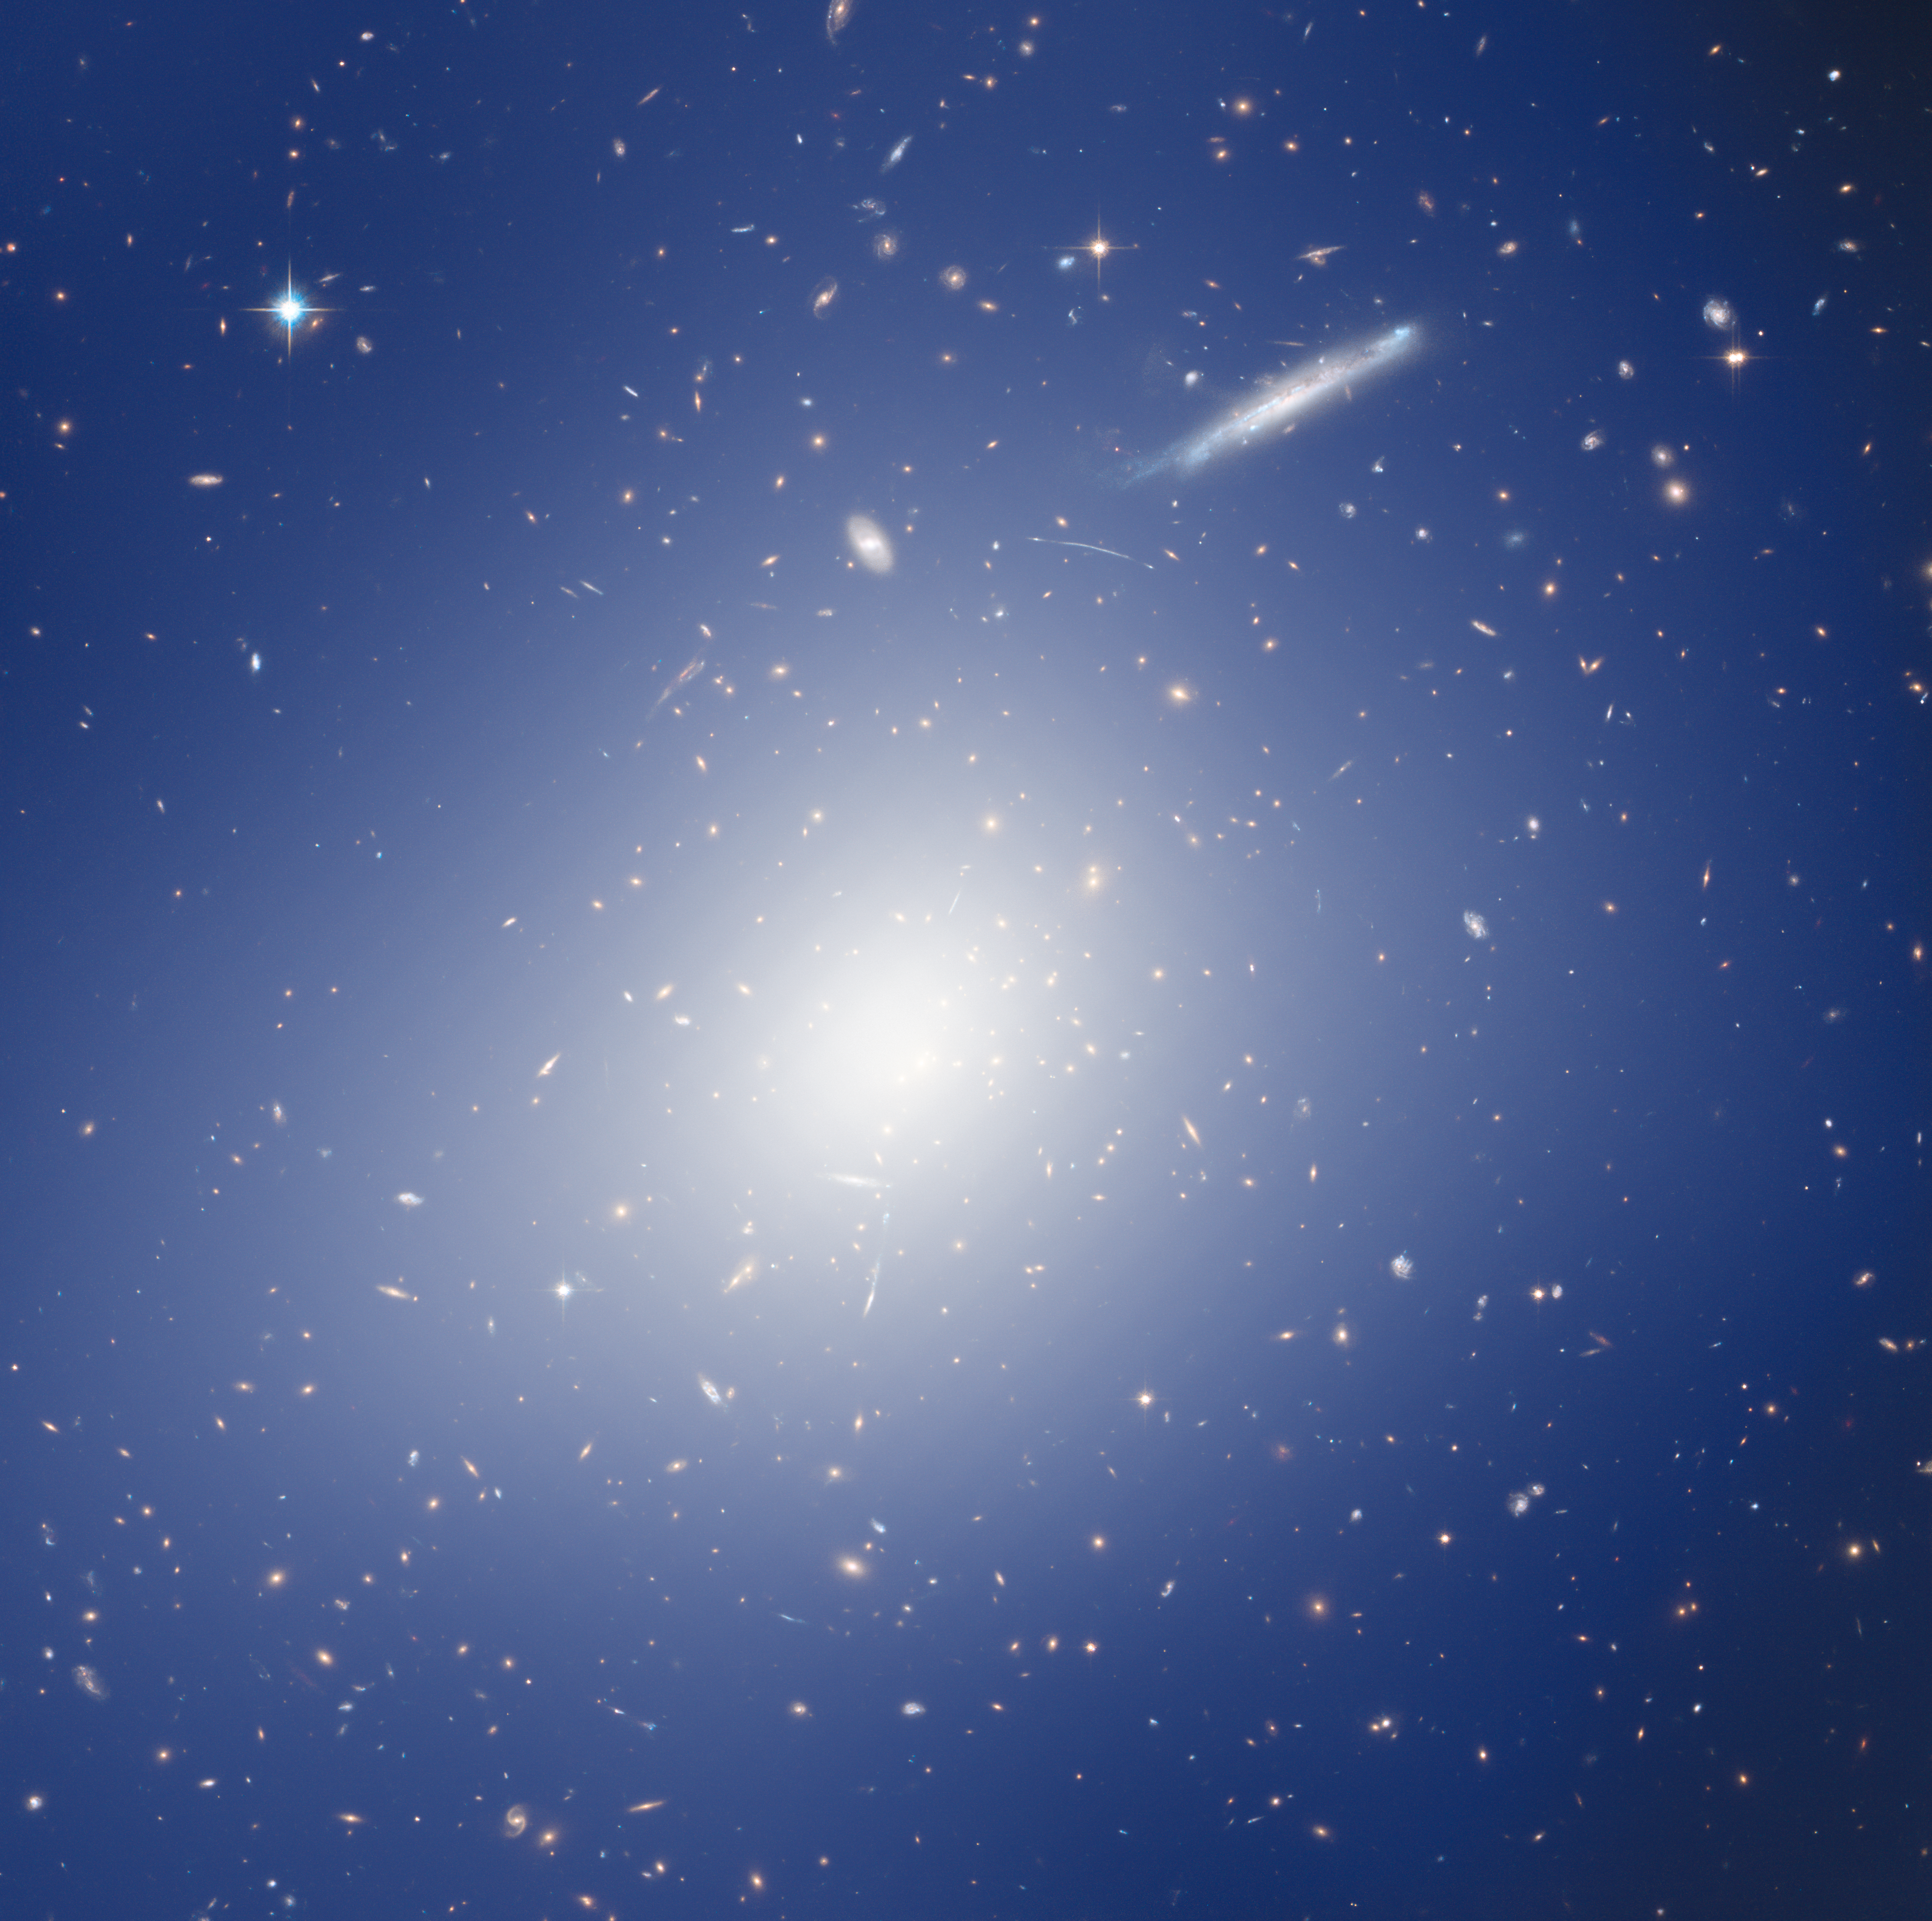

Hubble and HAWK-I explore a cluster with the mass of two quadrillion Suns

This image shows something spectacular: a massive galaxy cluster that it is warping the space around it! The cluster, whose heart is at the centre of the frame, is named RCS2 J2327, and is one of the most massive clusters known at its distance or beyond.

Massive objects such as RCS2 J2327 have such a strong influence on their surroundings that they visibly warp the space around them. This effect is known as gravitational lensing. In this way, they cause the light from more distant objects to be bent, distorted, and magnified, allowing us to see galaxies that would otherwise be far too distant to detect. Gravitational lensing is one of the predictions of Einstein's theory of general relativity. Strong lensing produces stunning images of distorted galaxies and sweeping arcs; both of which can be seen in this image. Weak gravitational lensing, on the other hand, is more subtle, hardly seen directly in an image, and is mostly studied statistically — but it provides a way to measure the masses of cosmic objects, as in the case of this cluster.

This image is a composite of observations from the HAWK-I instrument on ESO’s Very Large Telescope and the NASA/ESA Hubble Space Telescope’s Advanced Camera for Surveys. It demonstrates an impressively detailed collaborative approach to studying weak lensing in the cosmos. The study found RCS2 J2327 to contain the mass of two quadrillion Suns!

The diffuse blue and white image covering the picture shows a mass map. It is connected to the amount of mass thought to be contained within each region.

Credit: ESO, ESA/Hubble & NASA